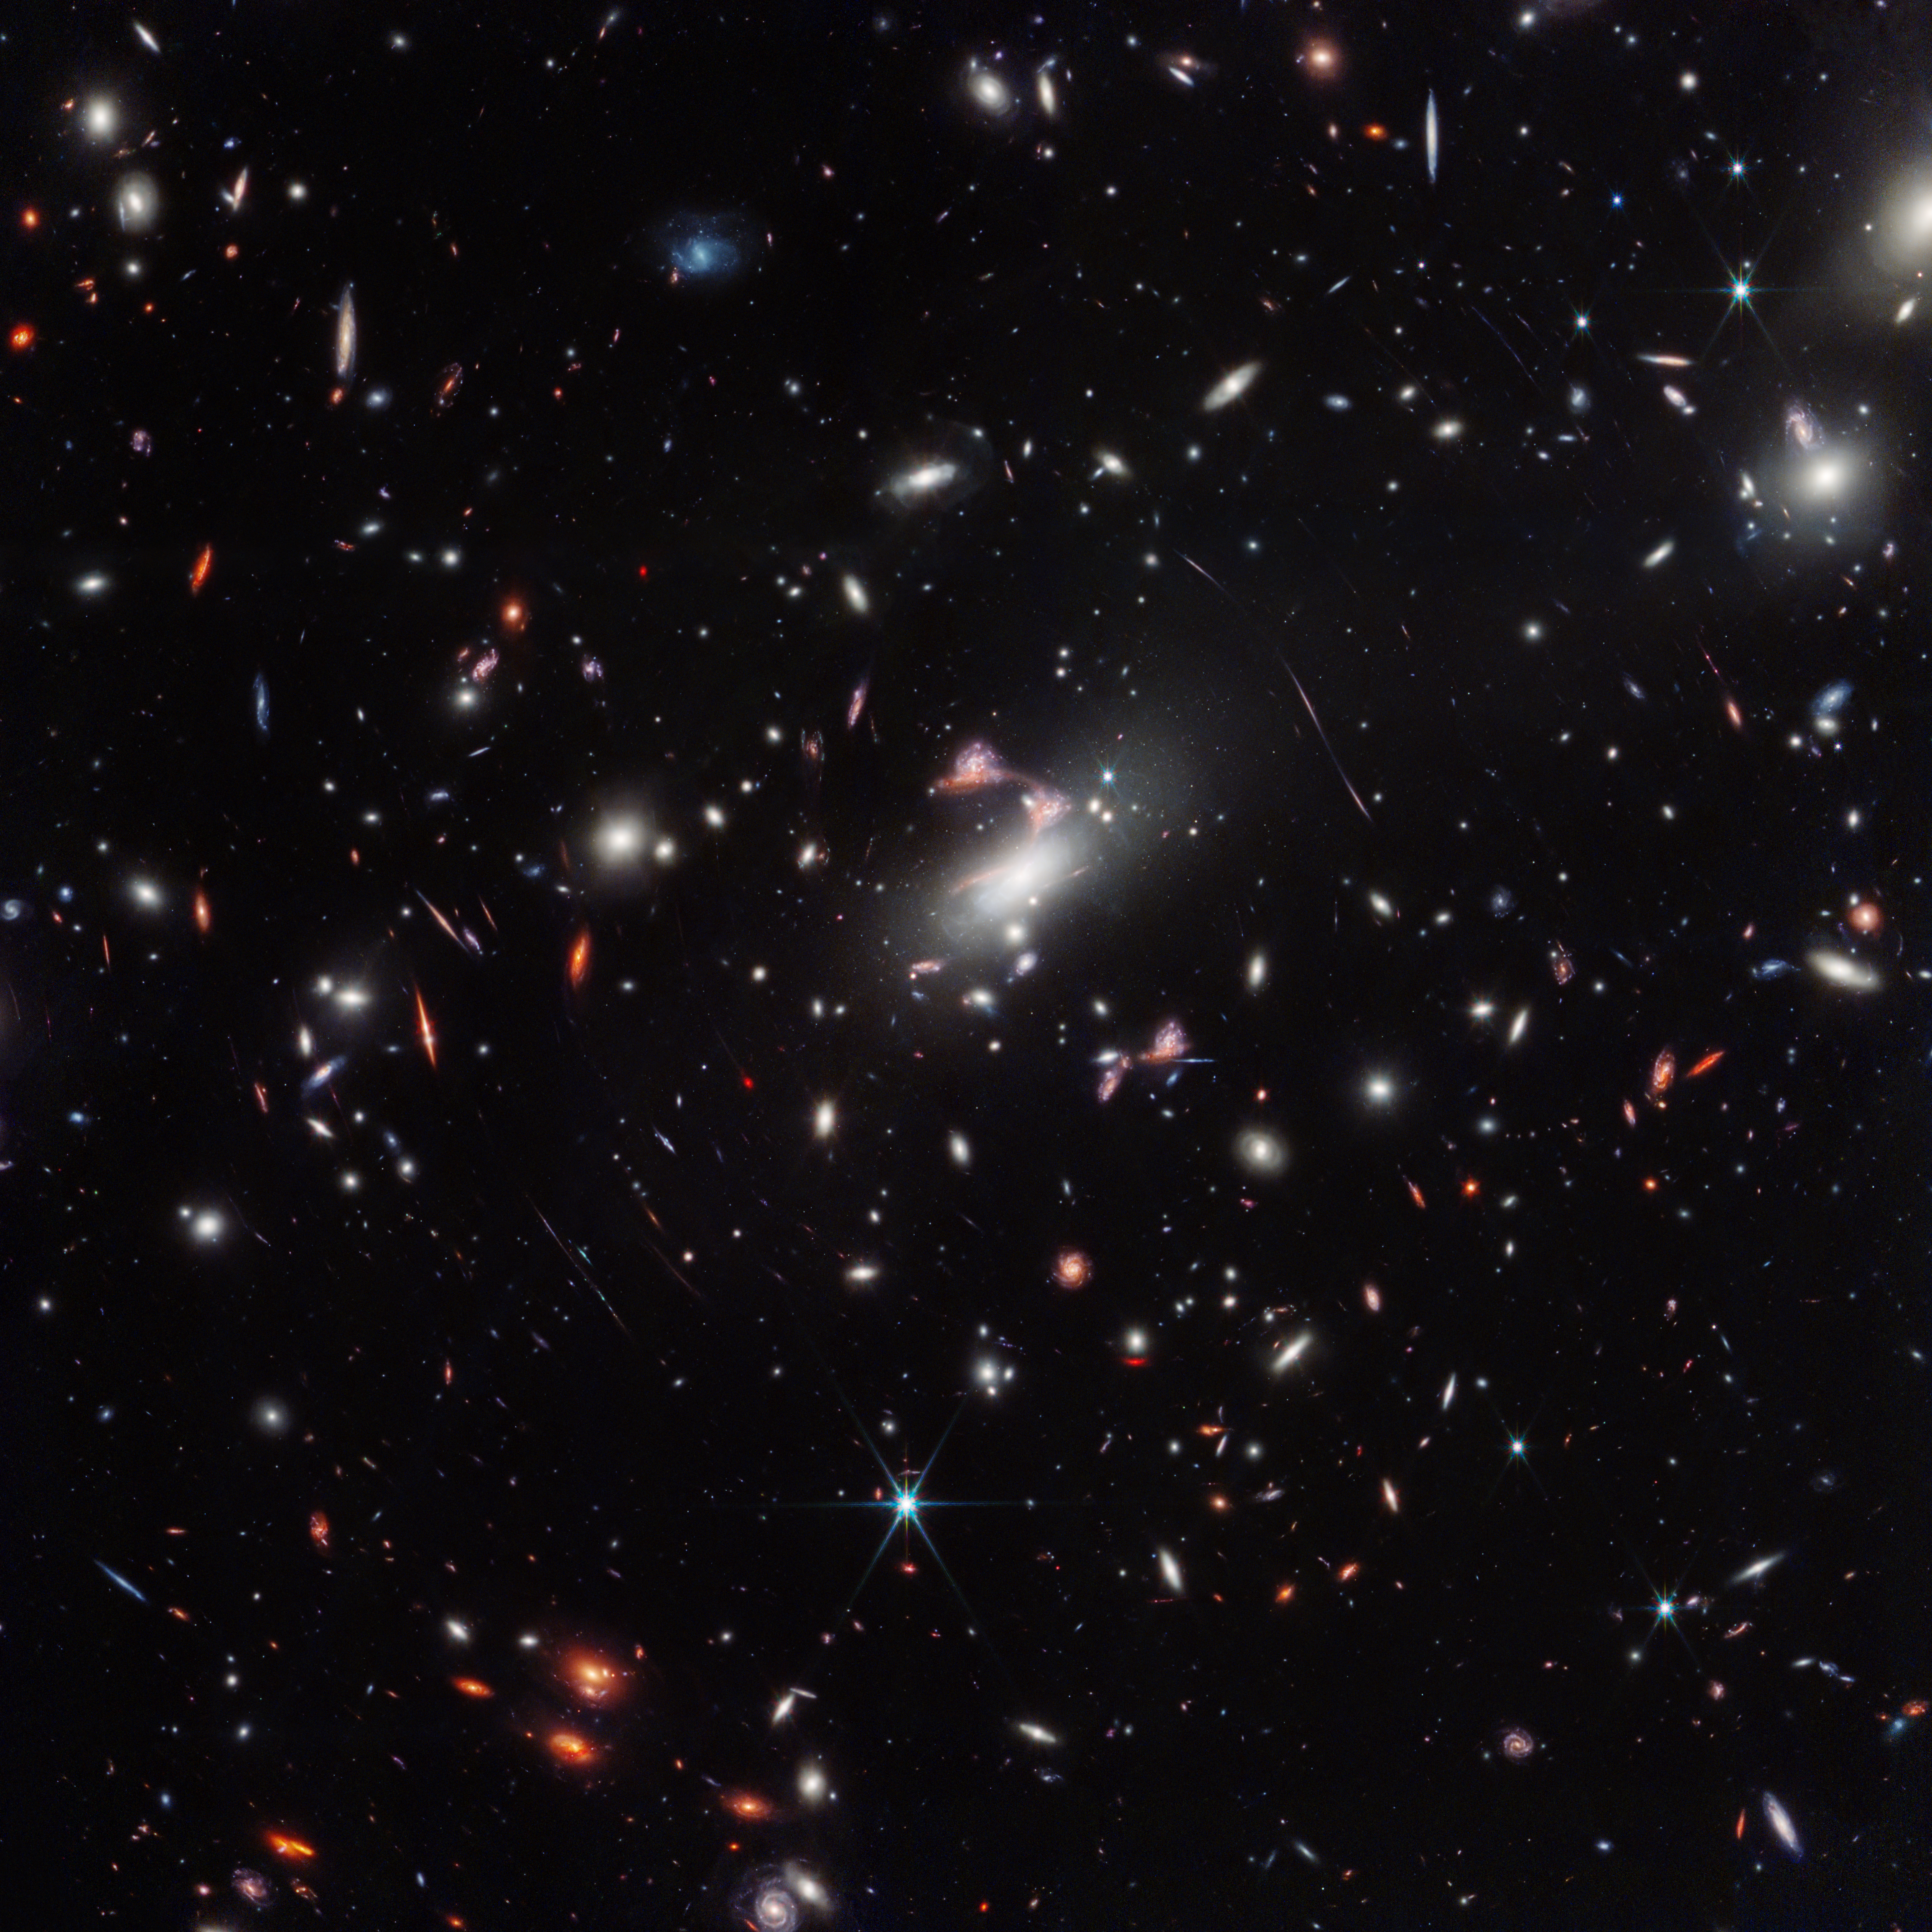

MACS J0417.5-1154 Wide Field (NIRCam)

A cosmic question mark appears amid a powerful gravitational lens in the James Webb Space Telescope’s wide-field view of the galaxy cluster MACS-J0417.5-1154. Gravitational lensing occurs when something is so massive, like this galaxy cluster, that it warps the fabric of space-time itself, creating a natural funhouse-mirror effect that also magnifies galaxies behind it.

The rarely seen type of lensing captured here, which astronomers term hyperbolic umbilic, created five repeated images of one galaxy pair. The red, elongated member of this pair traces the familiar shape of a question mark across the sky due to the distortion, with another unrelated galaxy happening to be in just the right space-time to appear like the question mark’s dot – especially for humans who love to recognize familiar shapes and patterns.

Credit: NASA, ESA, CSA, STScI, V. Estrada-Carpenter (Saint Mary’s University)